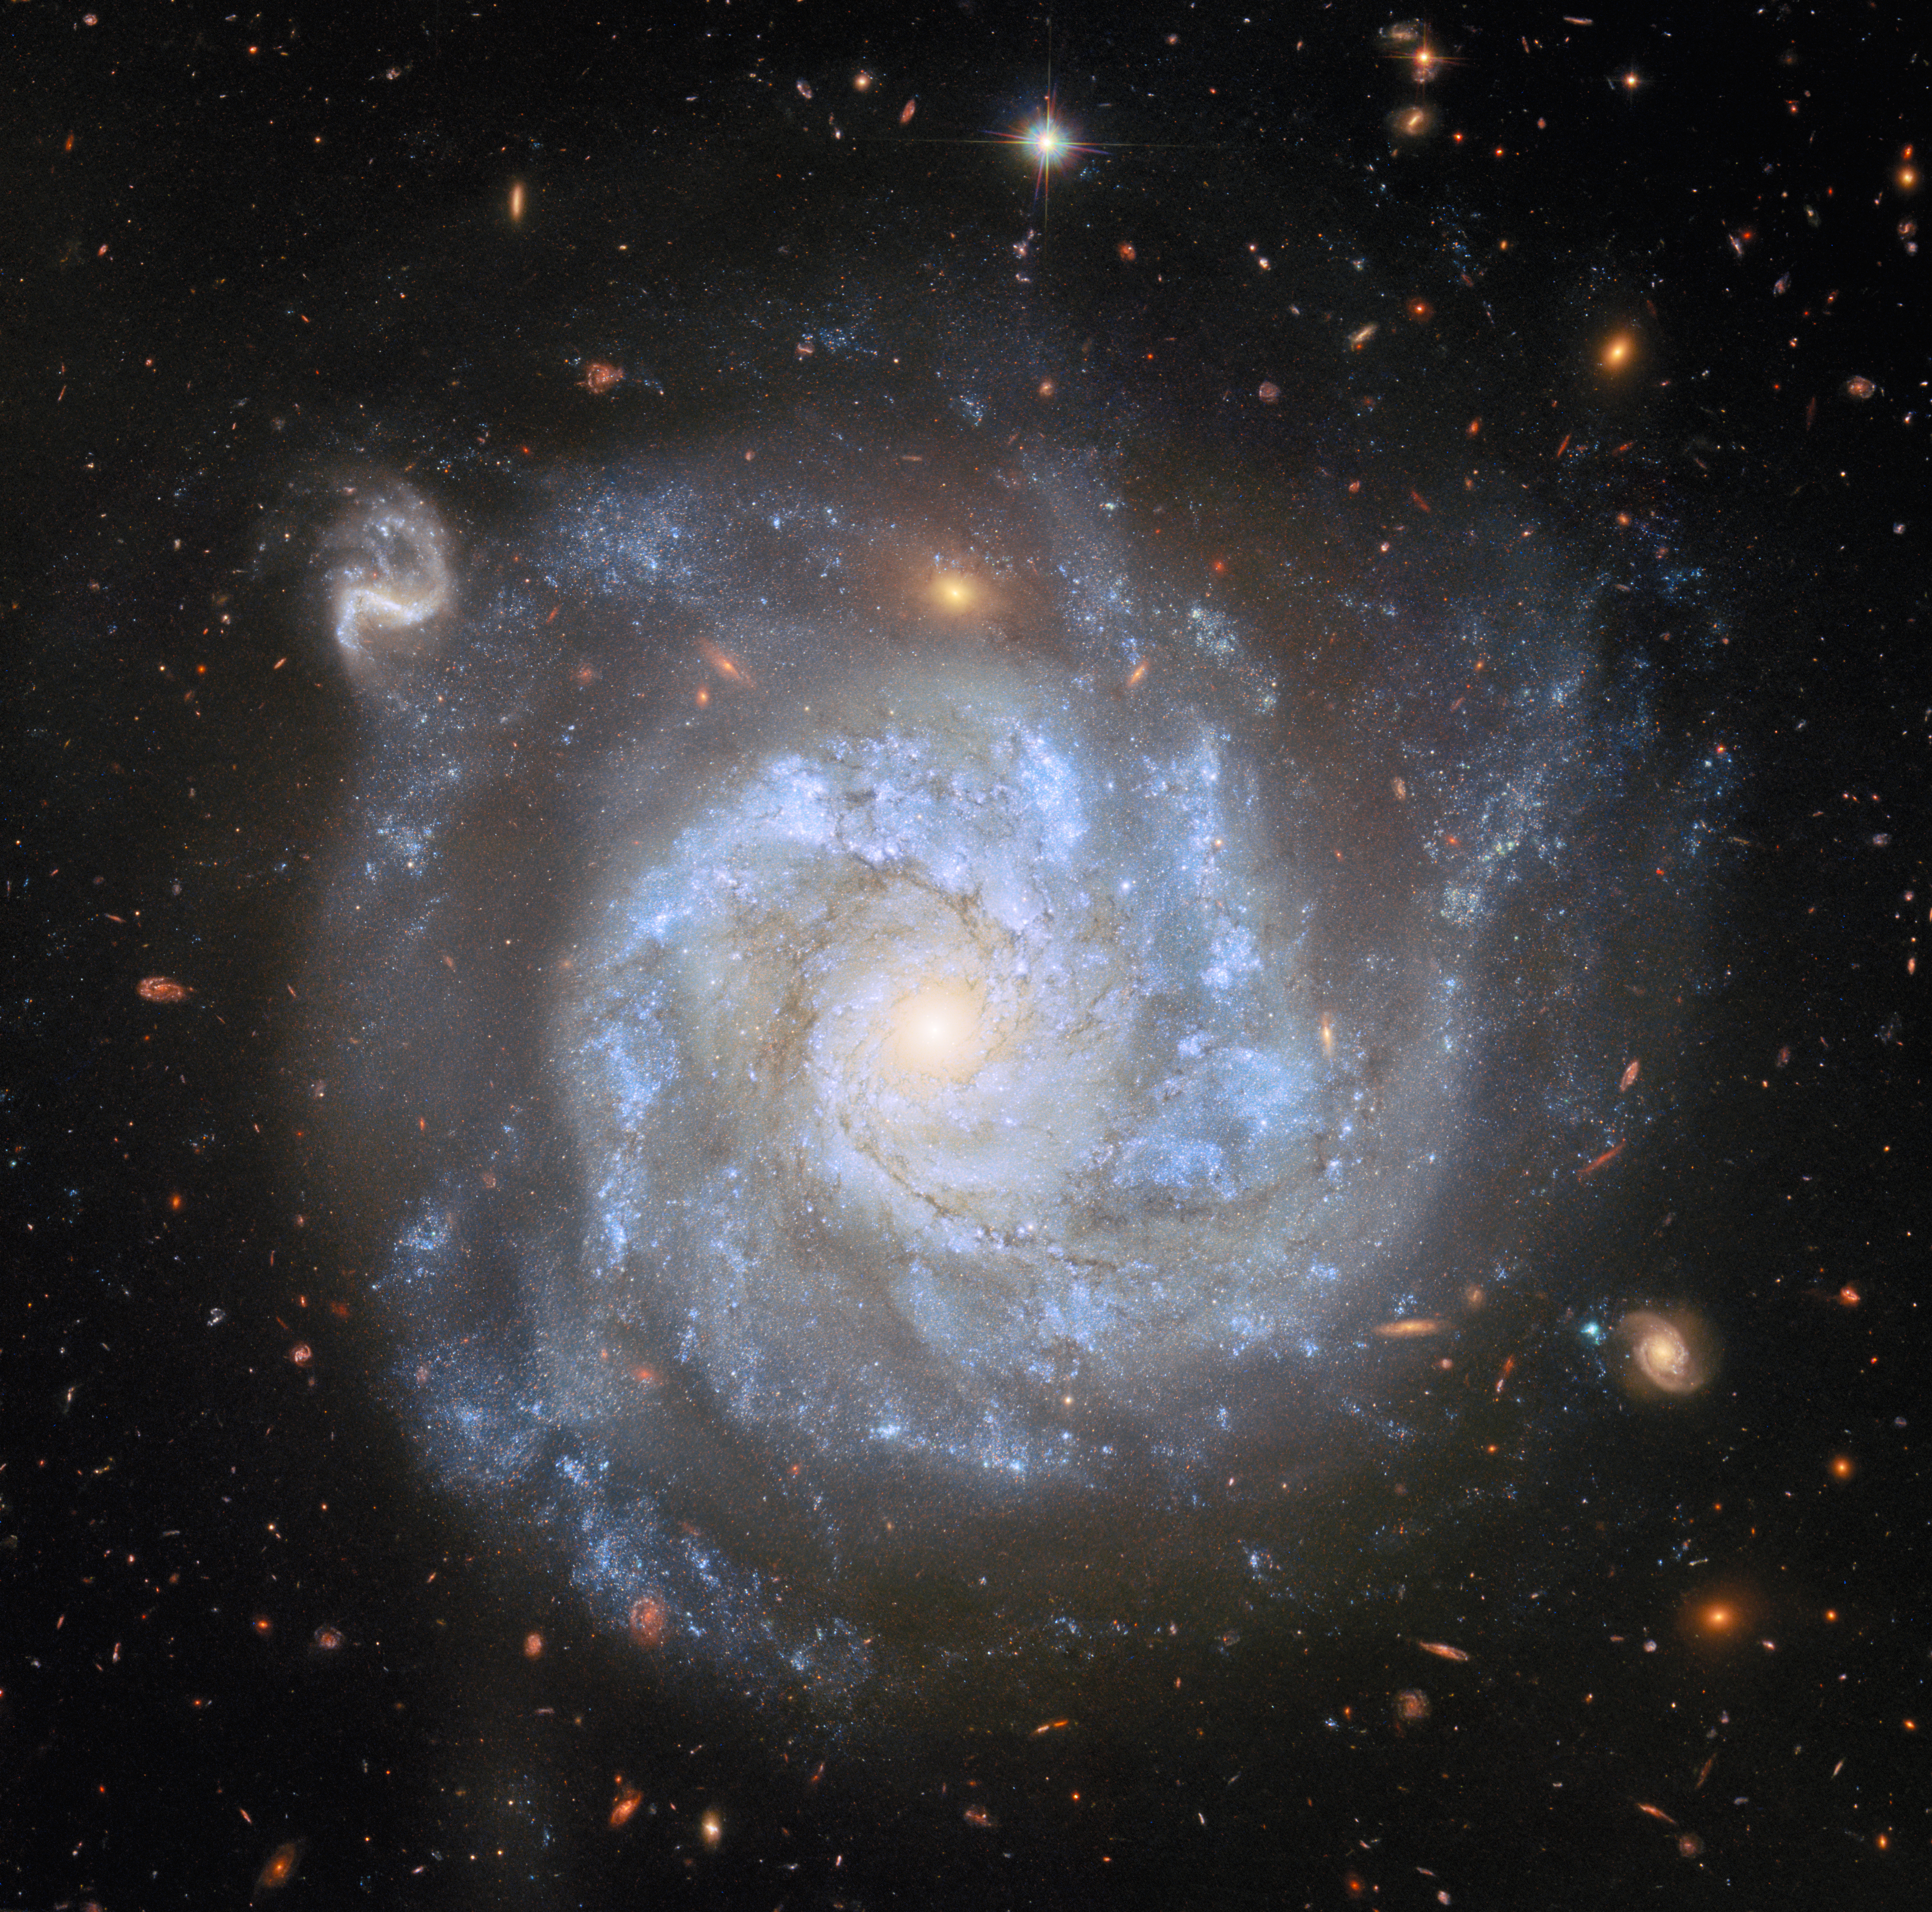

A supernova-rich spiral

Rich with detail, the spiral galaxy NGC 1309 shines in this NASA/ESA Hubble Space Telescope Picture of the Week. NGC 1309 is situated about 100 million light-years away in the constellation Eridanus.

This stunning Hubble image encompasses NGC 1309’s bluish stars, dark brown gas clouds and pearly white centre, as well as hundreds of distant background galaxies. Nearly every smudge, streak and blob of light in this image is an individual galaxy. The only exception to the extragalactic ensemble is a star, which can be identified near the top of the frame by its diffraction spikes. It is positively neighbourly, just a few thousand light-years away in the Milky Way galaxy.

Hubble has turned its attention toward NGC 1309 several times; previous Hubble images of this galaxy were released in 2006 and 2014. Much of NGC 1309’s scientific interest derives from two supernovae, SN 2002fk in 2002 and SN 2012Z in 2012. SN 2002fk was a perfect example of a Type Ia supernova, which happens when the core of a dead star (a white dwarf) explodes.

SN 2012Z, on the other hand, was a bit of a renegade. It was classified as a Type Iax supernova: while its spectrum resembled that of a Type Ia supernova, the explosion wasn’t as bright as expected. Hubble observations showed that in this case, the supernova did not destroy the white dwarf completely, leaving behind a ‘zombie star’ that shone even brighter than it did before the explosion. Hubble observations of NGC 1309 taken across several years also made this the first time the white dwarf progenitor of a supernova has been identified in images taken before the explosion.

Credit: ESA/Hubble & NASA, L. Galbany, S. Jha, K. Noll, A. Riess